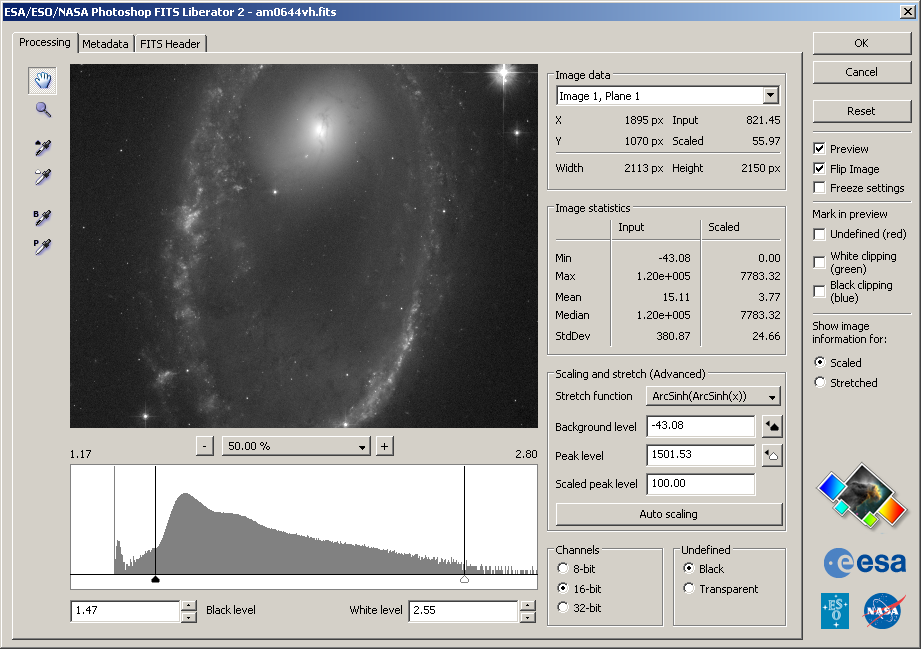

ESA/ESO/NASA Photoshop FITS Liberator v. 2.2 released

Today, an updated version of the popular software has been released with, among other features, native support for Intel-based Macs. Another key update is a much improved support for embedding of descriptive information, so-called metadata, directly within the final image. Based on a updated version 1.1 standard for Astronomy Visualization Metadata, this information is stored in the standard manner like that used by digital cameras to record exposure information.

The FITS Liberator is freely available for download from:

http://www.spacetelescope.org/projects/fits_liberator/download_v22.html

Version 2.2 of The ESA/ESO/NASA Photoshop FITS Liberator has been improved in several areas, some of which are:

Universal Binary for Mac allows native CS3 operation on Intel-based systems
Flip image checkbox allows image orientation to be selected on import.
Root functions (x1/2, x1/3, x1/4, x1/5) now operate antisymmetrically about x=0.
Version 1.1 of the Astronomy Visualization Metadata (AVM) standard is now fully supported. For more information see http://www.virtualastronomy.org
The import of coordinate metadata from the FITS header has been improved.

Credit: NASA & ESA